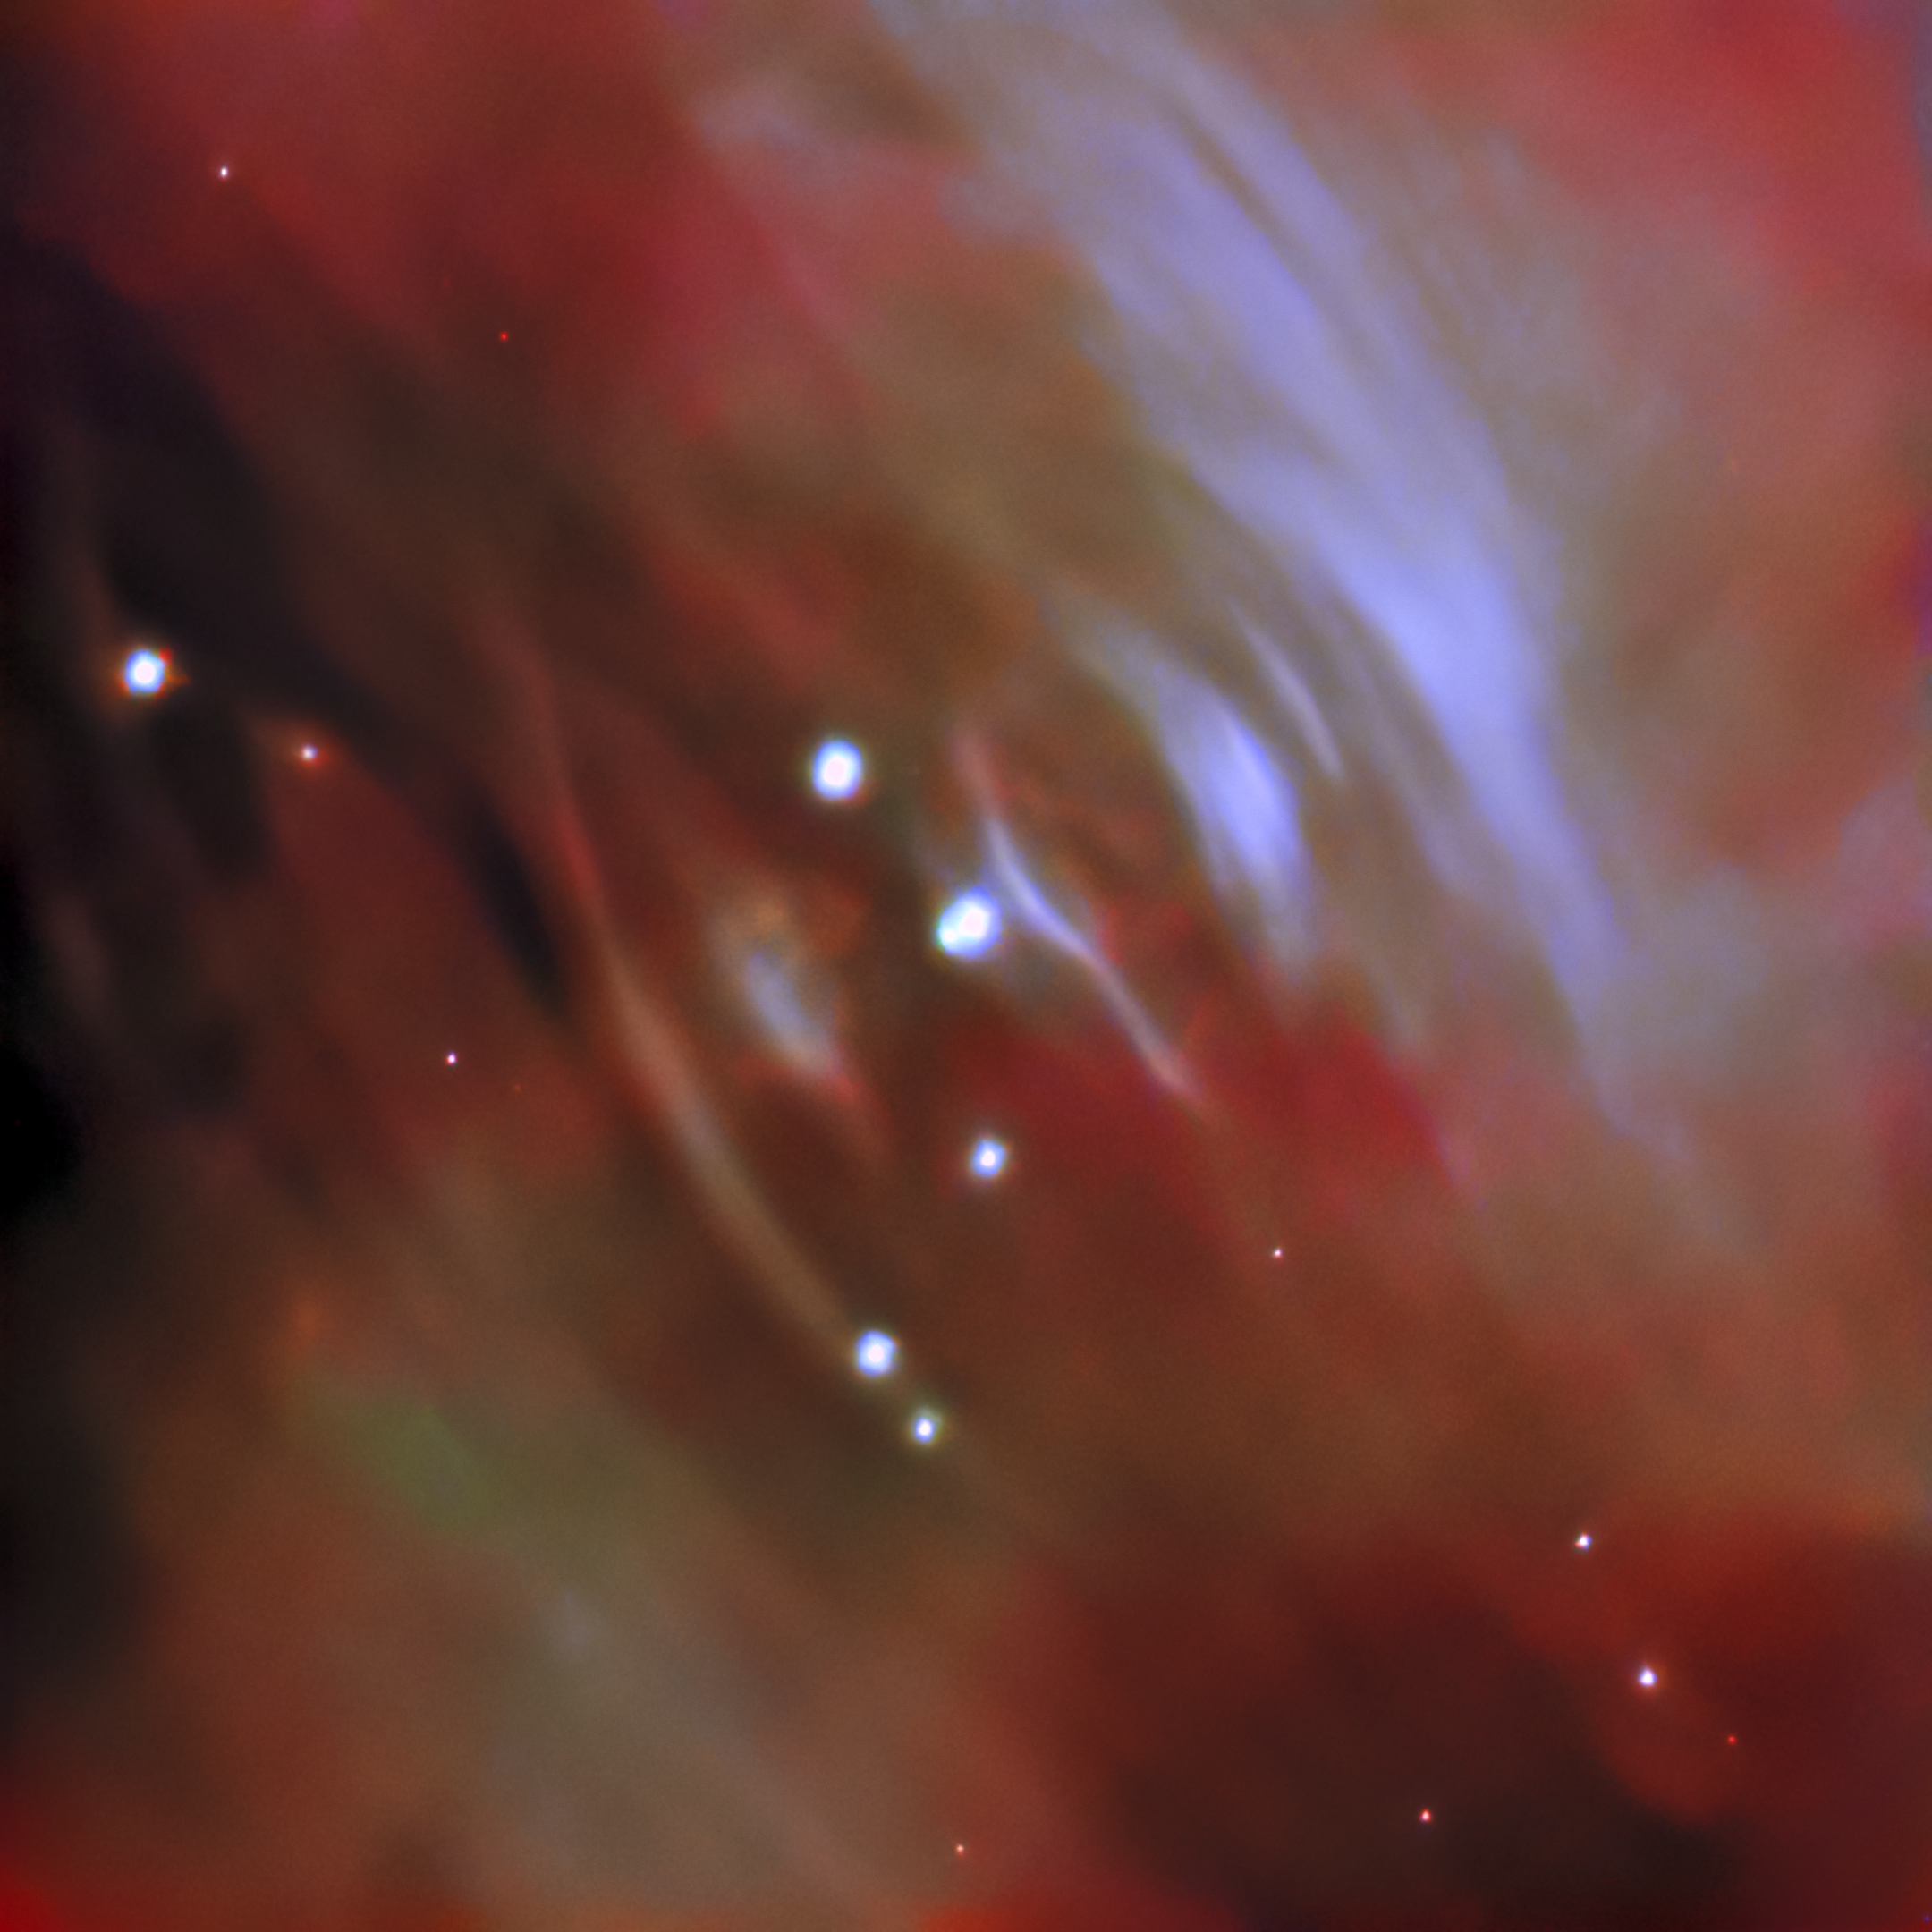

Cosmic Ripples — image created with FITS Liberator

This image was “liberated” with the FITS Liberator from the FITS file from the Gemini North telescope. It captures the heart of Messier 1, the Crab Nebula. Formed by a colossal supernova explosion in the year 1054, the Crab Nebula consists of the outer layers of a now-dead massive star strewn across a region of space roughly 10 light-years across. The ripple-like structures visible in this image emanate from the heart of the nebula, where a pulsar — the dense, quickly rotating remains of the supernova’s progenitor star — is unleashing a hail of charged particles into the surrounding gas. The boundary where these charged particles slow down and pile up creates the bright ripples shown here. These ripples then expand outward over the course of months, causing the Crab Nebula to resemble a pool of disturbed water on an unimaginably vast scale.

Credit: International Gemini Observatory/NOIRLab/NSF/AURA Acknowledgements: J. Miller (Gemini Observatory/NOIRLab), T.A. Rector (University of Alaska Anchorage/NSF’s NOIRLab), M. Zamani & D. de Martin (NSF’s NOIRLab)